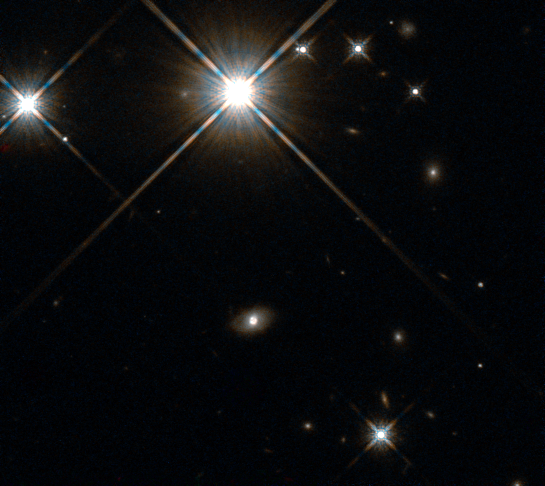

Hubble’s view on lensing galaxy

The galaxy SDSS J210415.89-062024.7 is located 2.5 billion light years away. It acted as a lens for a supernova at an even greater distance, creating four distinct images of the explosion — an effect created by strong gravitational lensing.

Credit: ESA/Hubble, NASA